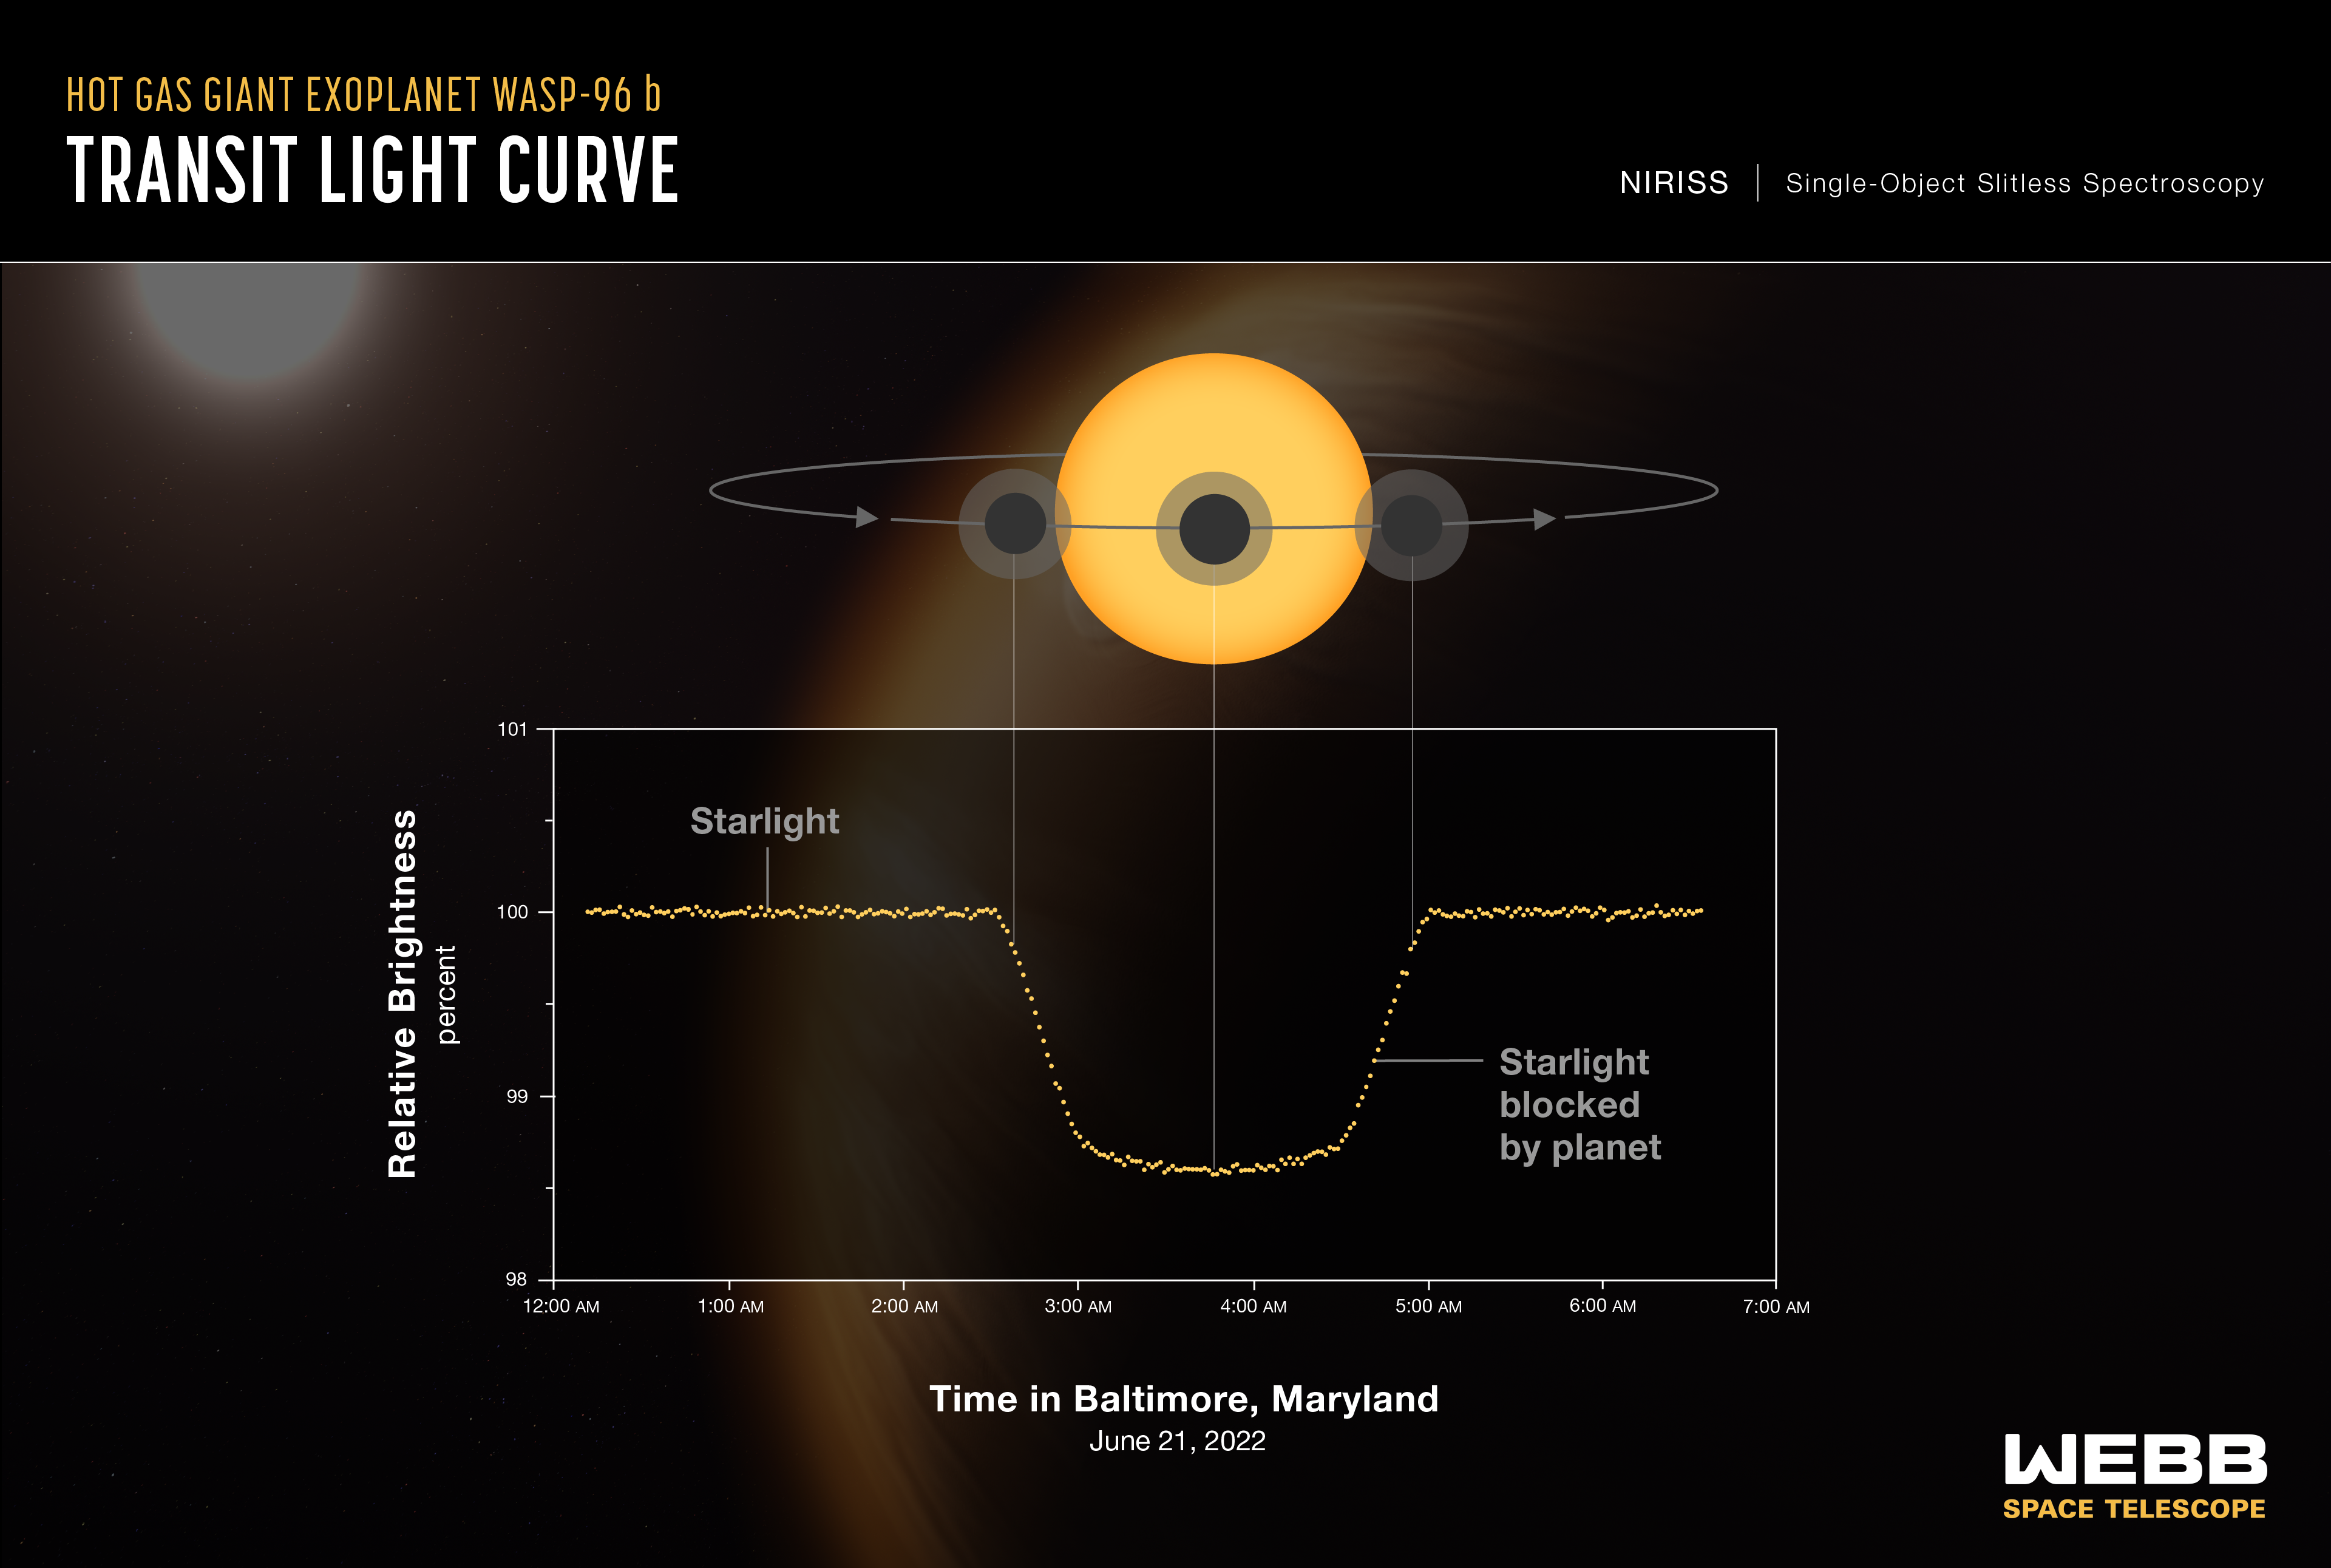

Exoplanet WASP-96 b (NIRISS Transit Light Curve)

A light curve from Webb’s Near-Infrared Imager and Slitless Spectrograp (NIRISS) shows the change in brightness of light from the WASP-96 star system over time as the planet transits the star. A transit occurs when an orbiting planet moves between the star and the telescope, blocking some of the light from the star. This observation was made using NIRISS’s Single-Object Slitless Spectroscopy (SOSS) mode, which involves capturing the spectrum of a single bright object, like the star WASP-96, in a field of view.

To capture these data, Webb stared at the WASP-96 star system for 6 hours 23 minutes, beginning about 2½ hours before the transit and ending about 1½ hours after the transit was complete. The transit itself lasted for just under 2½ hours. The curve includes a total of 280 individual brightness measurements – one every 1.4 minutes.

Because the observation was made using a spectrograph, which spreads the light out into hundreds of individual wavelengths, each of the 280 points on the graph represents the combined brightness of thousands of wavelengths of infrared light.

The actual dimming caused by the planet is extremely small: The difference between the brightest and dimmest points is less than 1.5 percent. NIRISS is ideally suited for this observation because it has the ability to observe relatively bright targets over time, along with the sensitivity needed to measure such small differences in brightness: In this observation, the instrument was able to measure differences in brightness as small as 0.02 percent.

Although the presence, size, mass, and orbit of the planet had already been determined based on previous transit observations, this transit light curve can be used to confirm and refine existing measurements, such as the planet’s diameter, the timing of the transit, and the planet’s orbital properties.

WASP-96 b is a hot gas giant exoplanet that orbits a Sun-like star roughly 1,150 light years away, in the constellation Phoenix. The planet orbits extremely close to its star (less than 1/20th the distance between Earth and the Sun) and completes one orbit in less than 3½ Earth-days. The planet’s discovery, from ground-based observations, was announced in 2014.

The background illustration of WASP-96 b and its Sun-like star is based on current understanding of the planet from both NIRISS spectroscopy and previous ground- and space-based observations. Webb has not captured a direct image of the planet or its atmosphere.

NIRISS was contributed by the Canadian Space Agency. The instrument was designed and built by Honeywell in collaboration with the Université de Montréal and the National Research Council Canada.

For a full array of Webb’s first images and spectra, including downloadable files, please visit: https://esawebb.org/initiatives/webbs-first-images/

Credit: NASA, ESA, CSA, STScI, and the Webb ERO Production Team